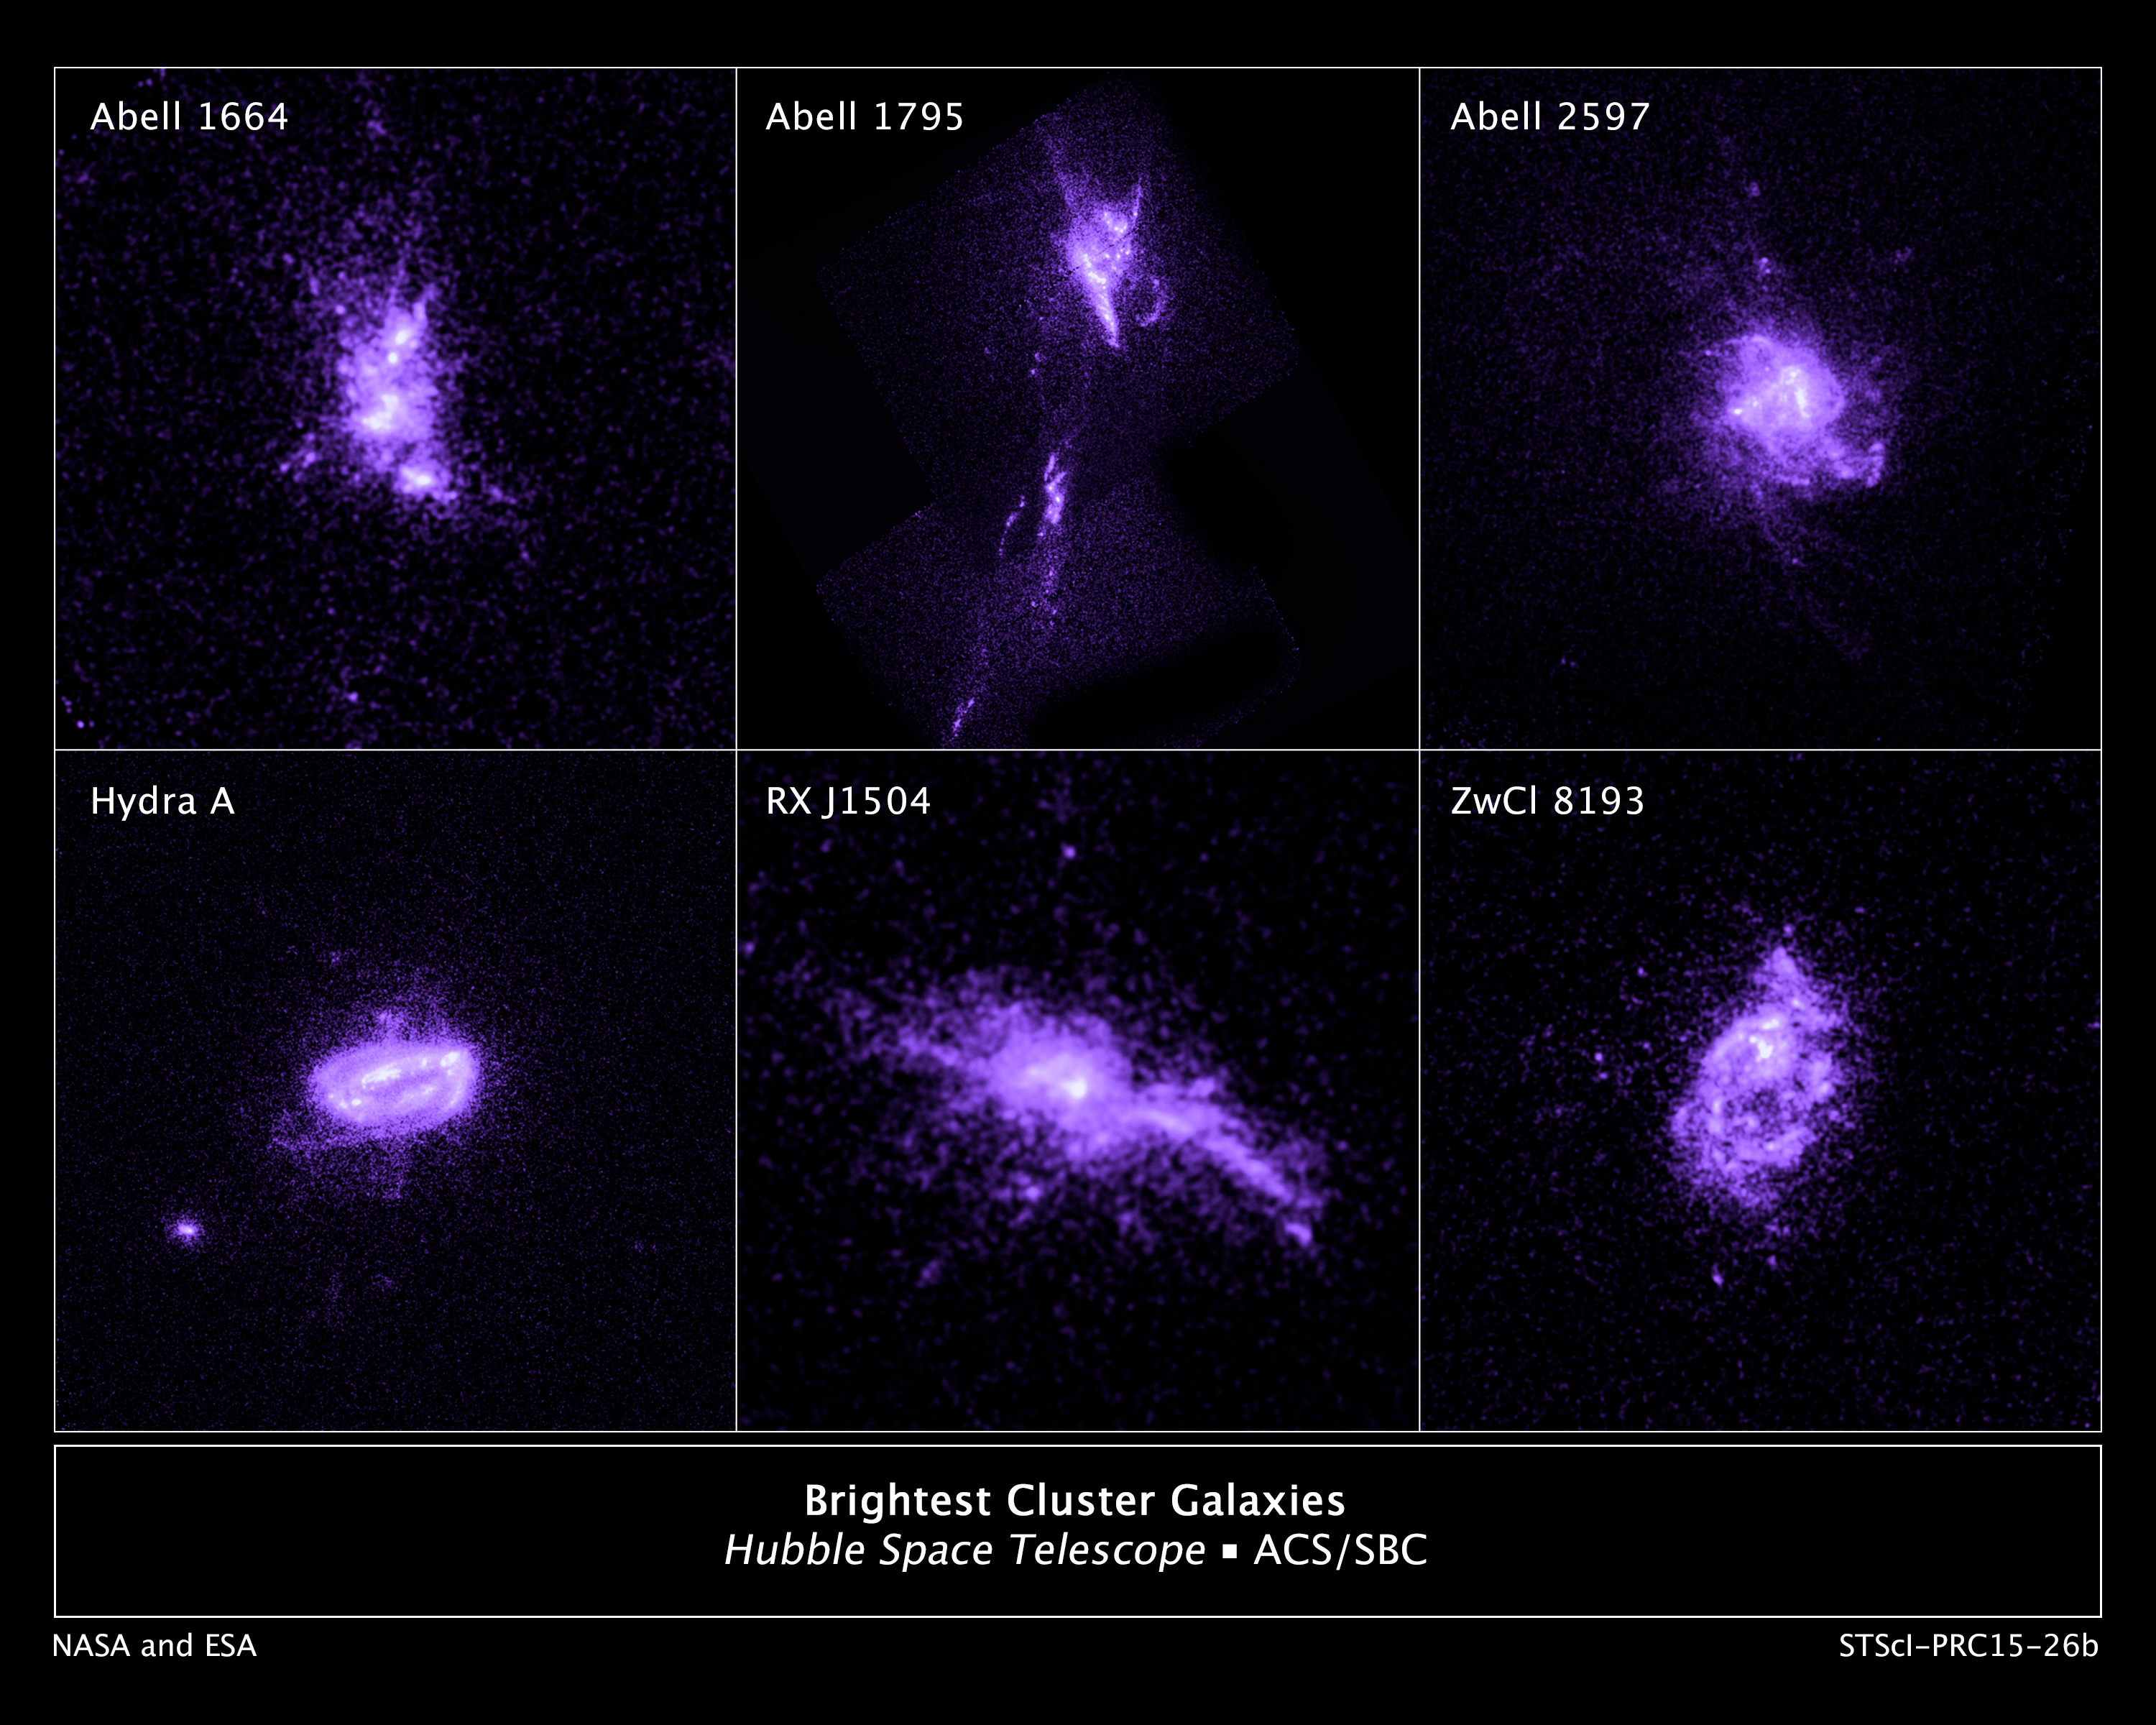

Brightest Cluster Galaxies

This sample of galaxies, as seen by Hubble, shows chains of star formation in ultraviolet light. This star formation is a product of the action of the jets from a central black hole that controls infalling gas from the galaxy's halo.

Credit: NASA, ESA, G. Tremblay (Yale University), and R. Mittal (Rochester Institute of Technology, and Max Planck Institute for Gravitational Physics)